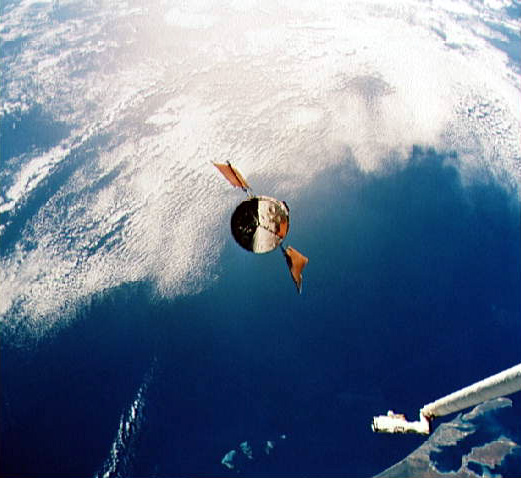

Hubble Space Telescope approaches Shuttle Endeavour

Part of the vast Indian Ocean forms the backdrop for the scene of the Hubble Space Telescope (HST) as it approaches the Space Shuttle Endeavour. Denham Sound and Shark Bay, on Australia's west coast, are just below the waiting mechanical arm at lower right corner.

Credit: NASA/ESA